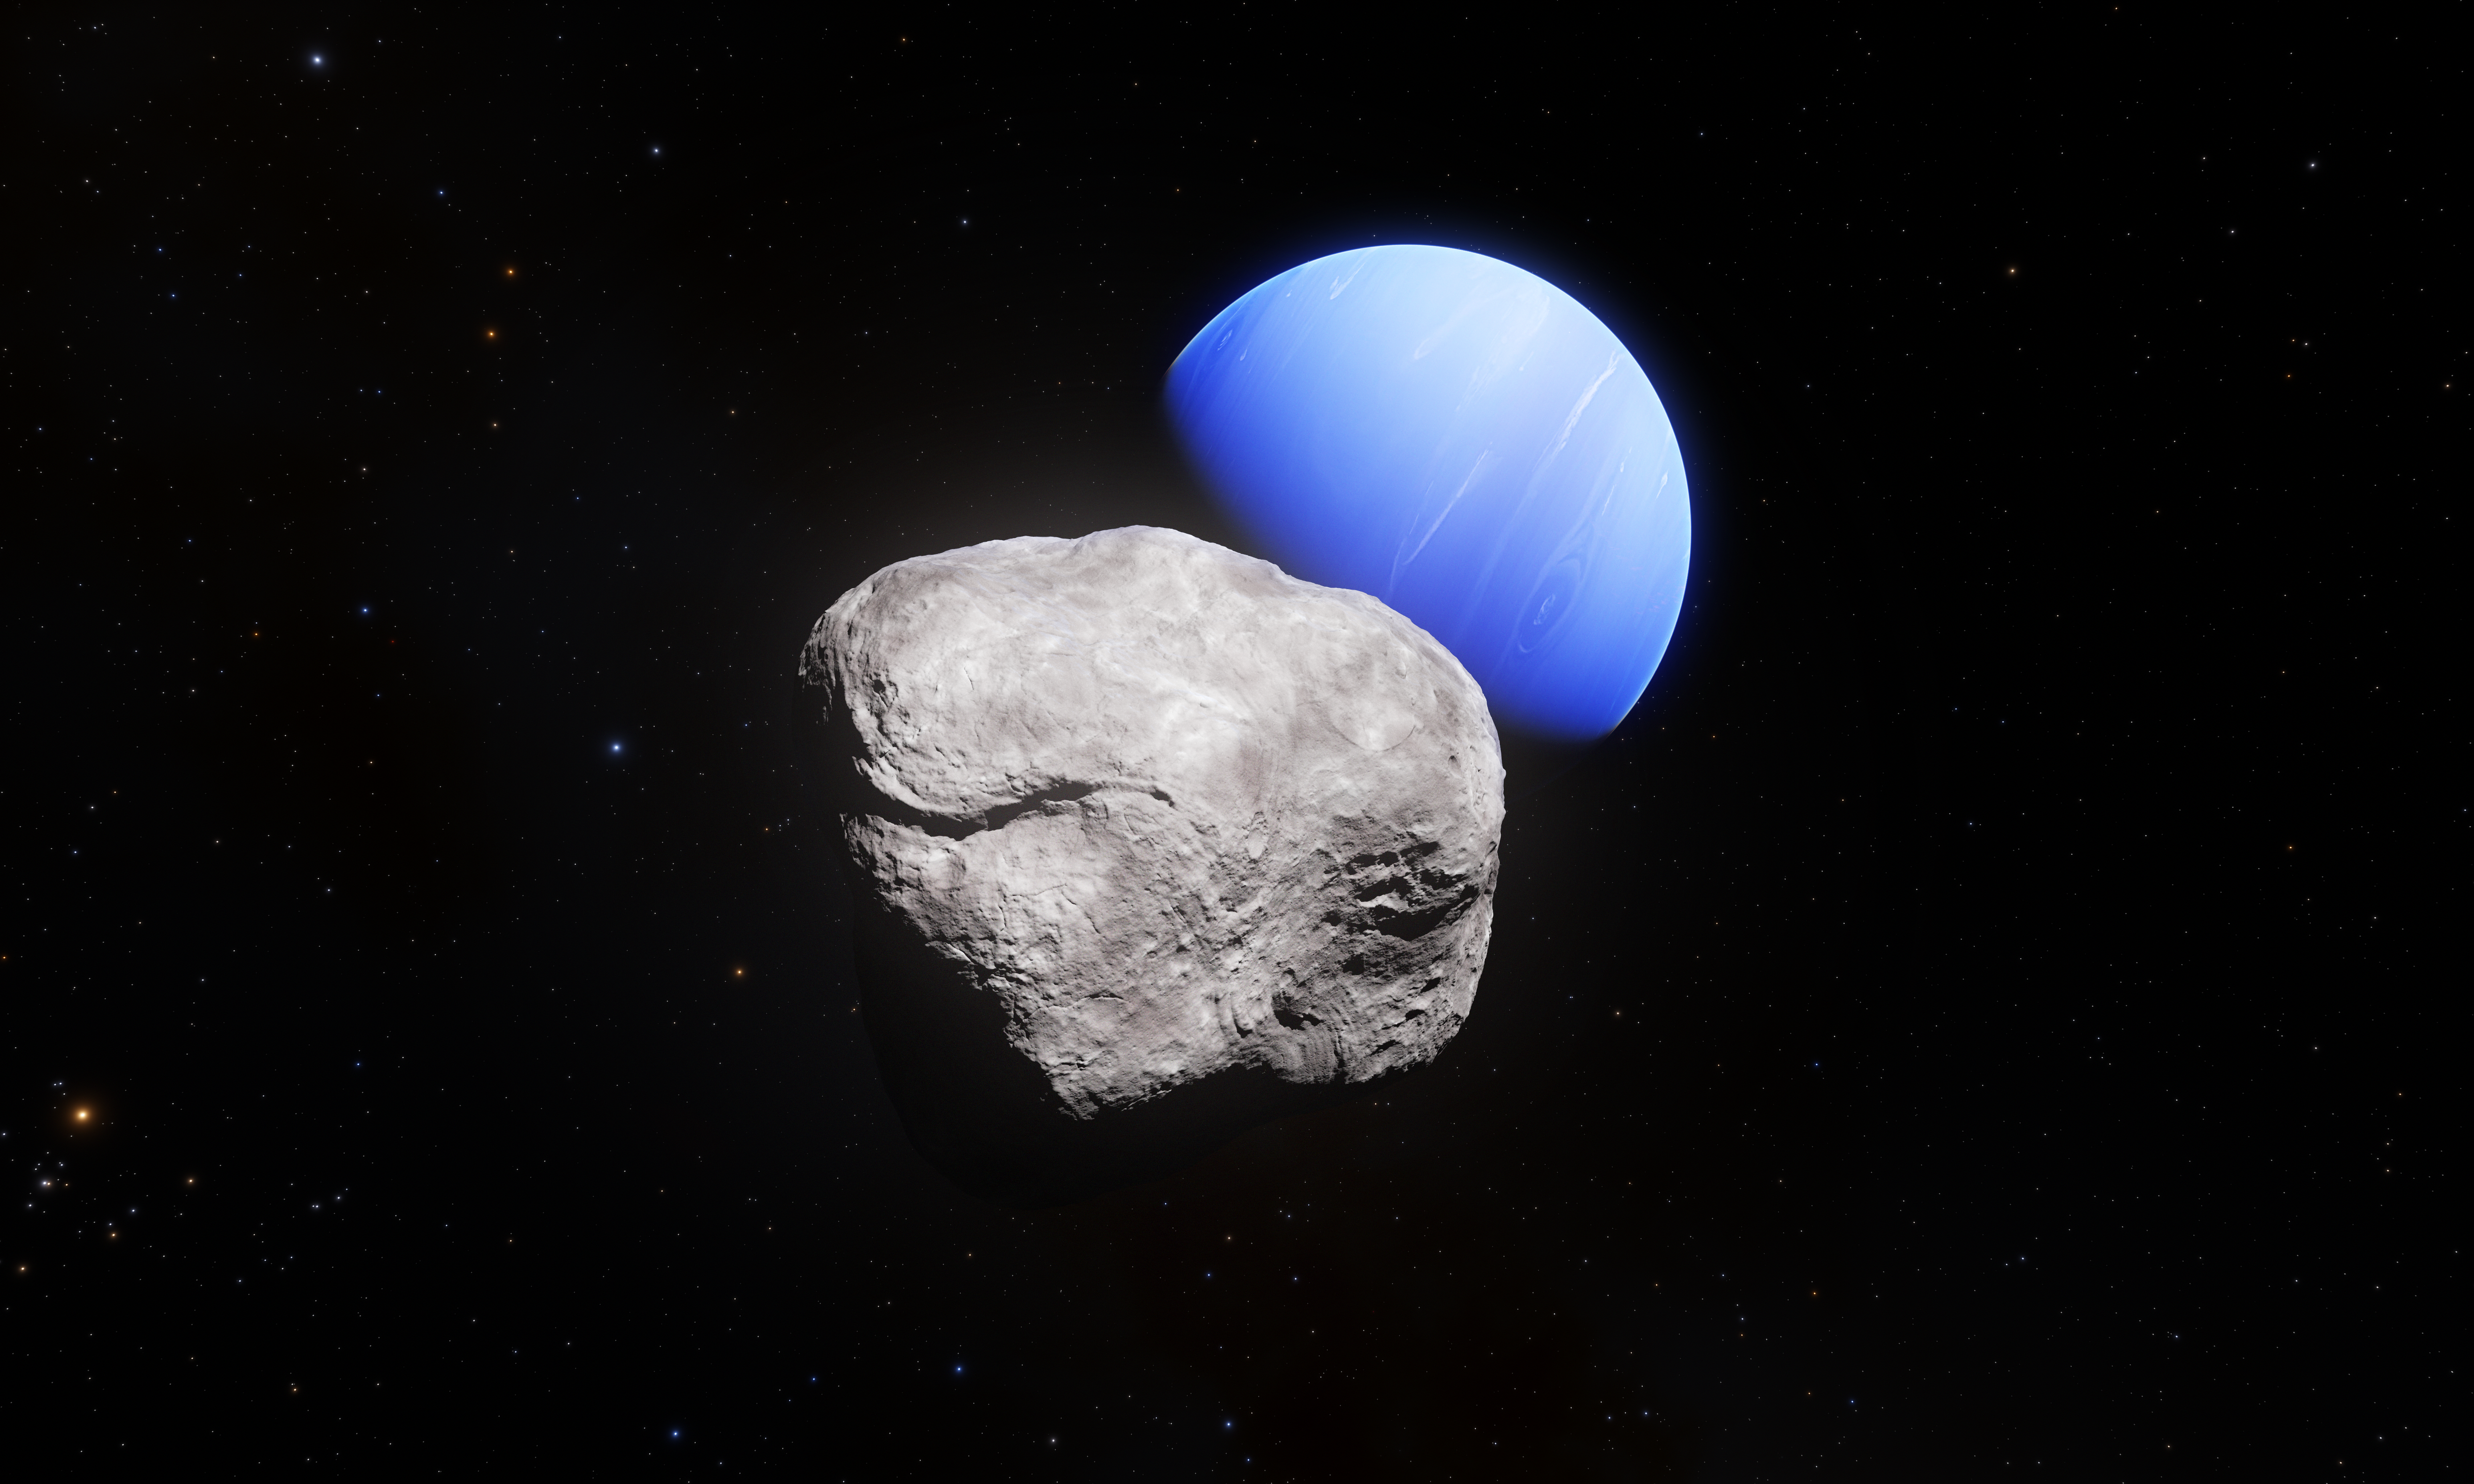

Neptune and its smallest moon Hippocamp (artist’s impression)

This artist’s impression shows the outermost planet of the Solar System, Neptune, and its small moon Hippocamp. Hippocamp was discovered in images taken with the NASA/ESA Hubble Space Telescope.

Whilst the images taken with Hubble allowed astronomers to discover the moon and also to measure its diameter, about 34 kilometres, these images do not allow us to see surface structures.

Credit: ESA/Hubble, NASA, L. Calçada